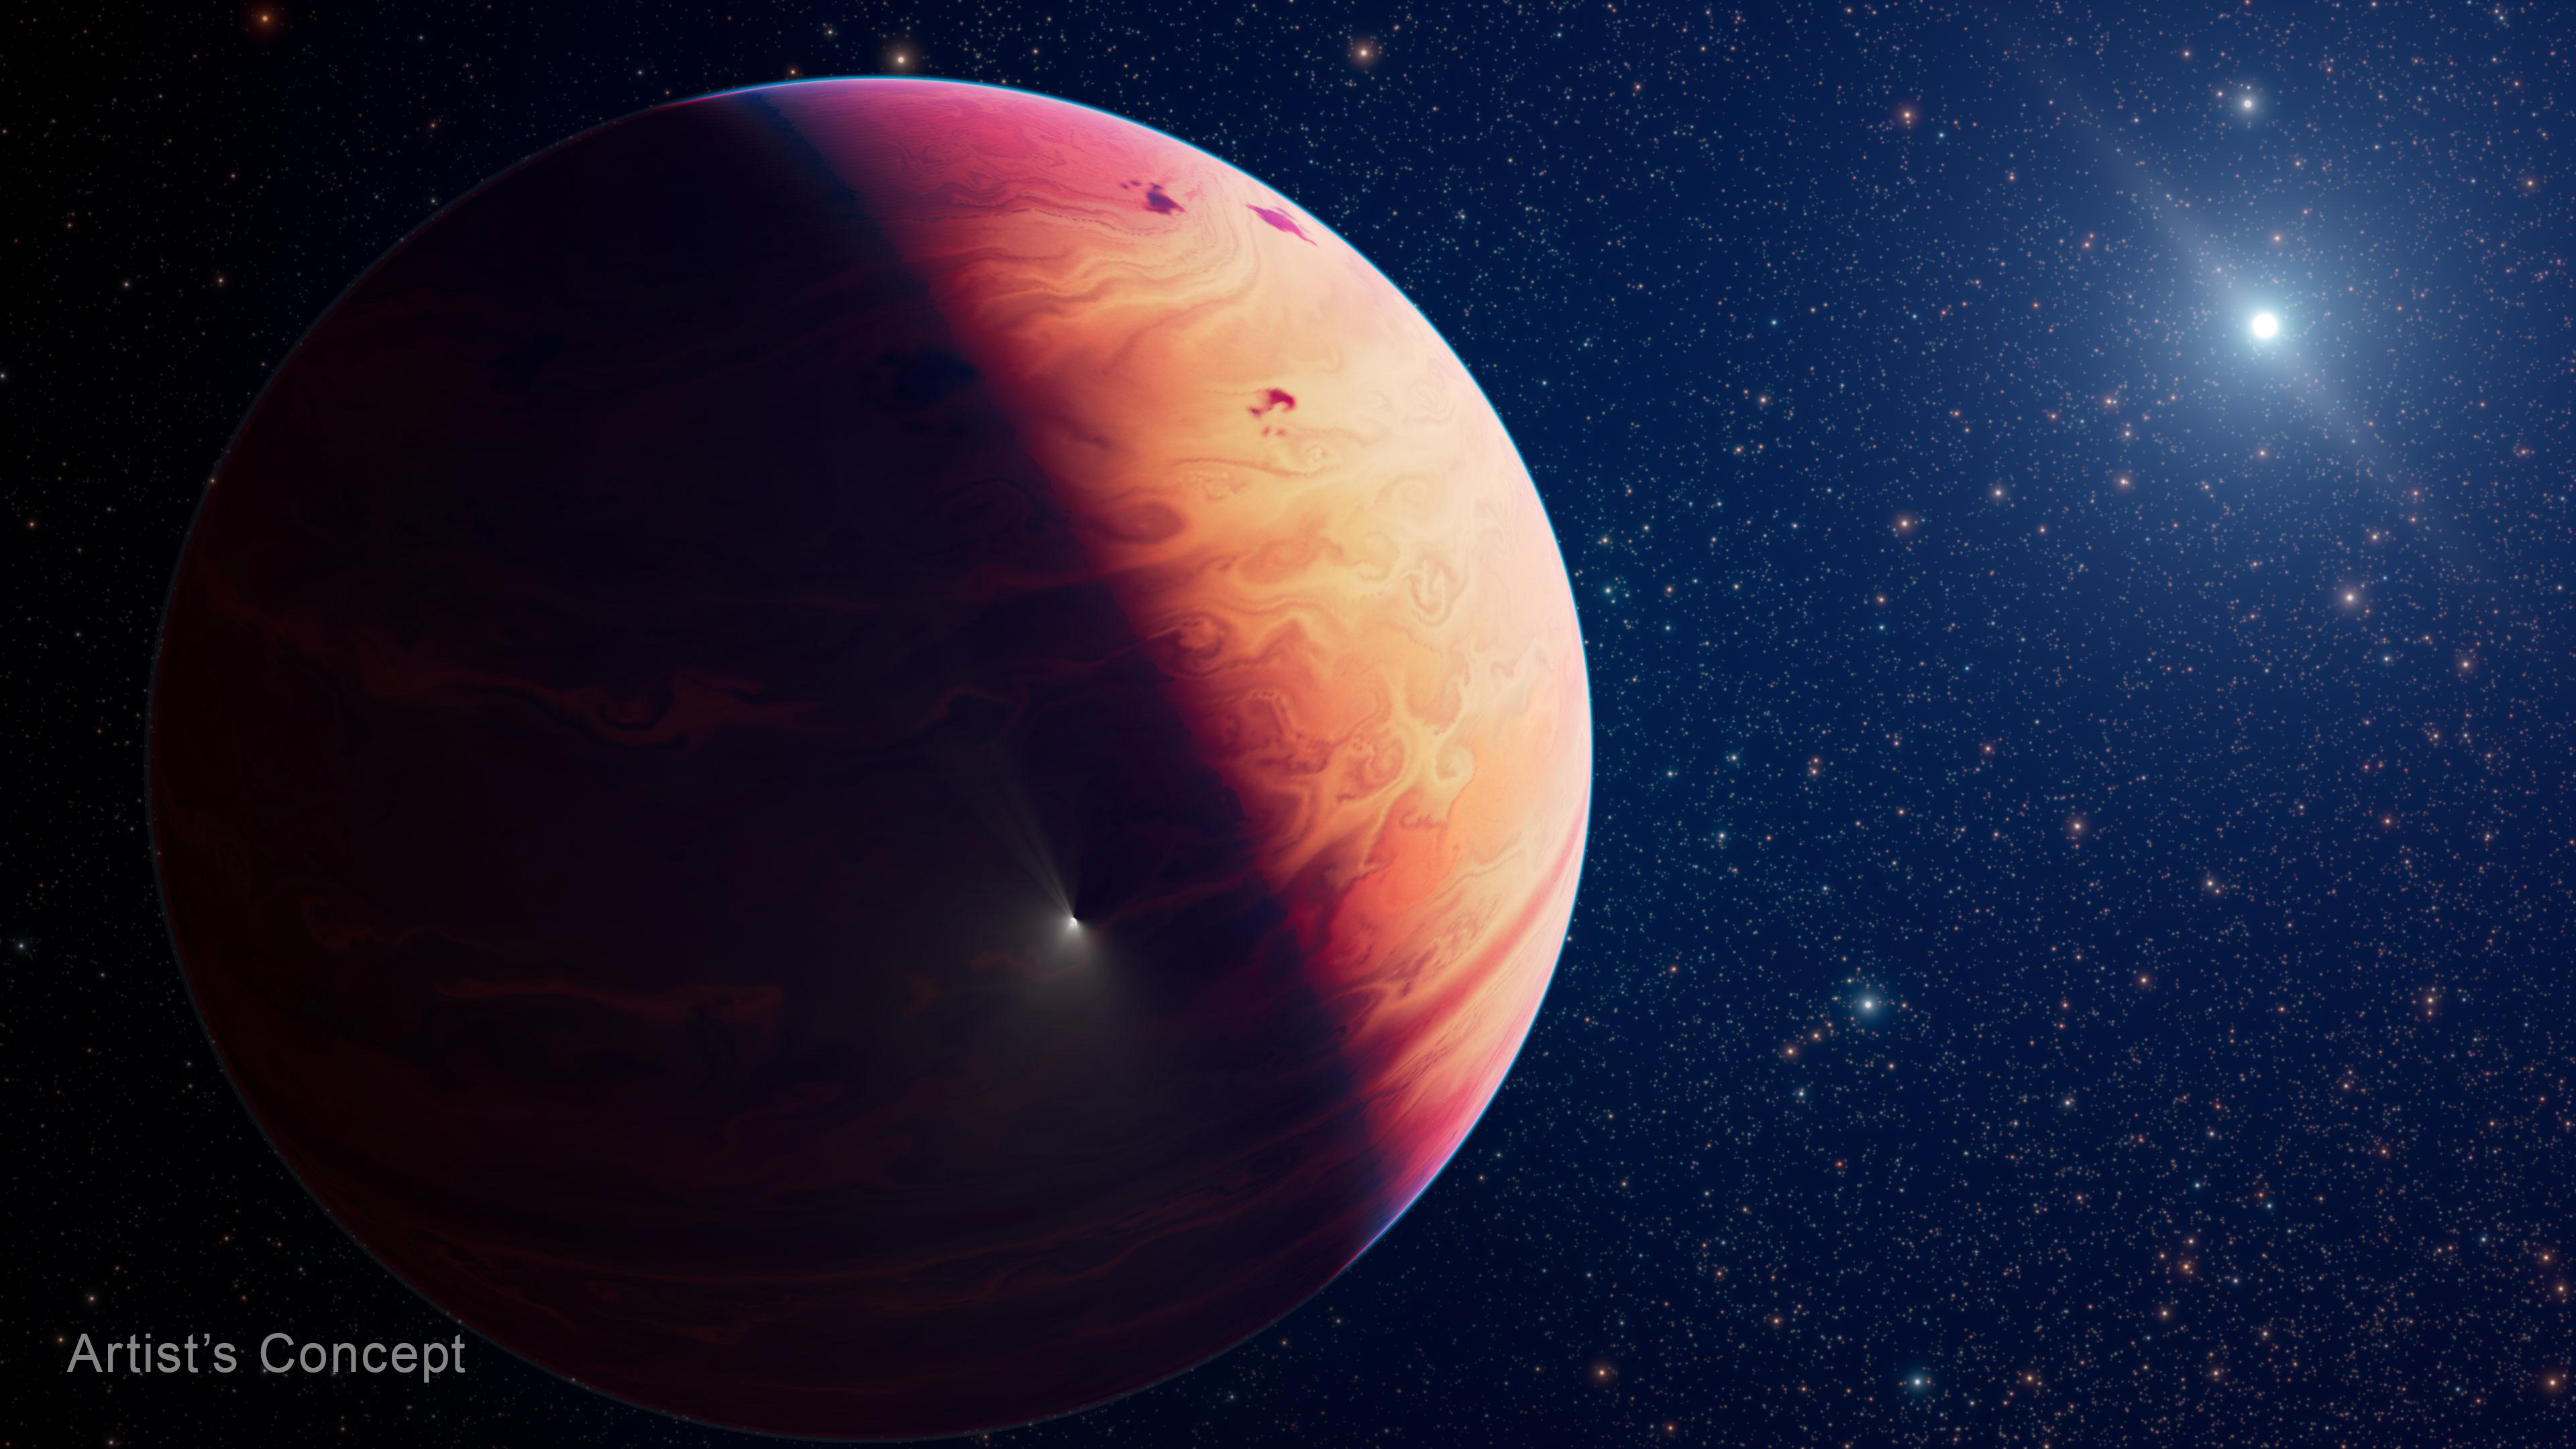

Exoplanet 29 Cygni b (Artist's Concept)

Exoplanet 29 Cygni b, seen in this artist’s concept, is a gas giant weighing about 15 times the mass of Jupiter. It orbits a type A star (shown at upper right) slightly hotter and more massive than our Sun, at an average distance of 2.4 billion kilometres. The star is known to possess a dusty debris disc. A hypothetical comet fragment is shown approaching the planet, while previous impacts have left dark splotches on its cloudtops, similar to what was seen from the Shoemaker-Levy 9 impact on Jupiter in our solar system.

Astronomers studied 29 Cygni b with Webb to determine that it likely formed from accretion, a bottom-up process where small bits of rock and ice clump together and grow larger over time, rather than from disc fragmentation. In other words, it formed like a planet and not like a star.

Credit: NASA, ESA, CSA, J. Olmsted (STScI)